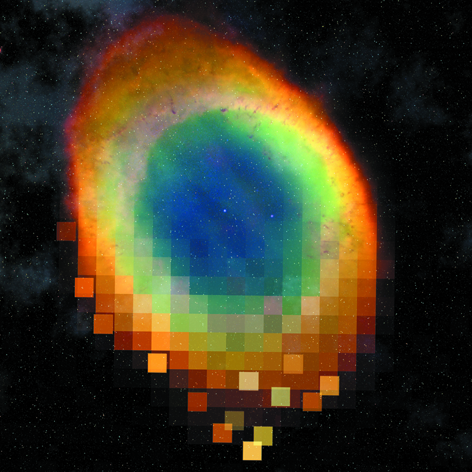

Metadata standard for astronomical images released

Today a new metadata standard for astronomical images has been released. This standard is part of the Astronomy Visualization Metadata (AVM) standard that will facilitate access to "print-ready" astronomical images saved in general formats such as JPEG, TIFF, and PNG that have been mainly obtained from astronomical observations.

Compelling imagery is a key tool of the astronomical education and public outreach (EPO) community to convey science results to the general public. These images are both derived from scientific observations and created as artistic visualizations of scientific results. They are typically available in common JPEG, TIFF, and PNG formats, not in the original scientific data formats (e.g. FITS files). Such resources are currently scattered across the internet in a variety of galleries and archives, but are not searchable in any coherent way that will isolate astronomy themed images in their appropriate context.

Just as Virtual Observatory standards open up all data archives to a common query engine, the EPO community will benefit greatly from a similar mechanism for image search and retrieval. A new standard, called the Astronomy Visualization Metadata (AVM) standard, has been developed for astronomical imagery defining a common set of content metadata fields suited for the needs of astronomical images. This encompasses images derived from data, artist's conceptions, simulations, photography, and can be ultimately extensible to video products. The first generation of tools are now available to tag images with this metadata, which can be embedded with the image file using an XML-based format that functions similarly to a FITS header.

As image collections are processed to include these AVM tags, extensive information providing educational context, credits, data sources, and even coordinate information will be readily accessible for uses spanning casual browsing, publication, and interactive media systems. The standard will – with time ?– allow individual image files to be catalogued and offered through search engines such as Google, the Virtual Observatory (VO) and other visualization tools. As the embedded metadata is of especial importance in digital photography and the publication industry, the standard for AVM proves to be a helpful tool since it smoothly integrates into those workflows. The new standard is similar to, and compatible with, the IPTC standard that is much used by digital photographers.

While the initial intent is to provide a wide variety of the astronomical outreach community with astronomical images, an extension is under way to also include metadata for videos as well.

The AVM standard has been endorsed by the International Virtual Observatory Alliance (IVOA) and was written by Robert Hurt (Spitzer Science Center), Lars Lindberg Christensen (ESA/Hubble), Adrienne Gauthier (Steward Observatory) with input from the IAU Virtual Repository Working Group under IAU Commission 55 Communicating Astronomy with the Public.

Credit: NASA & ESA